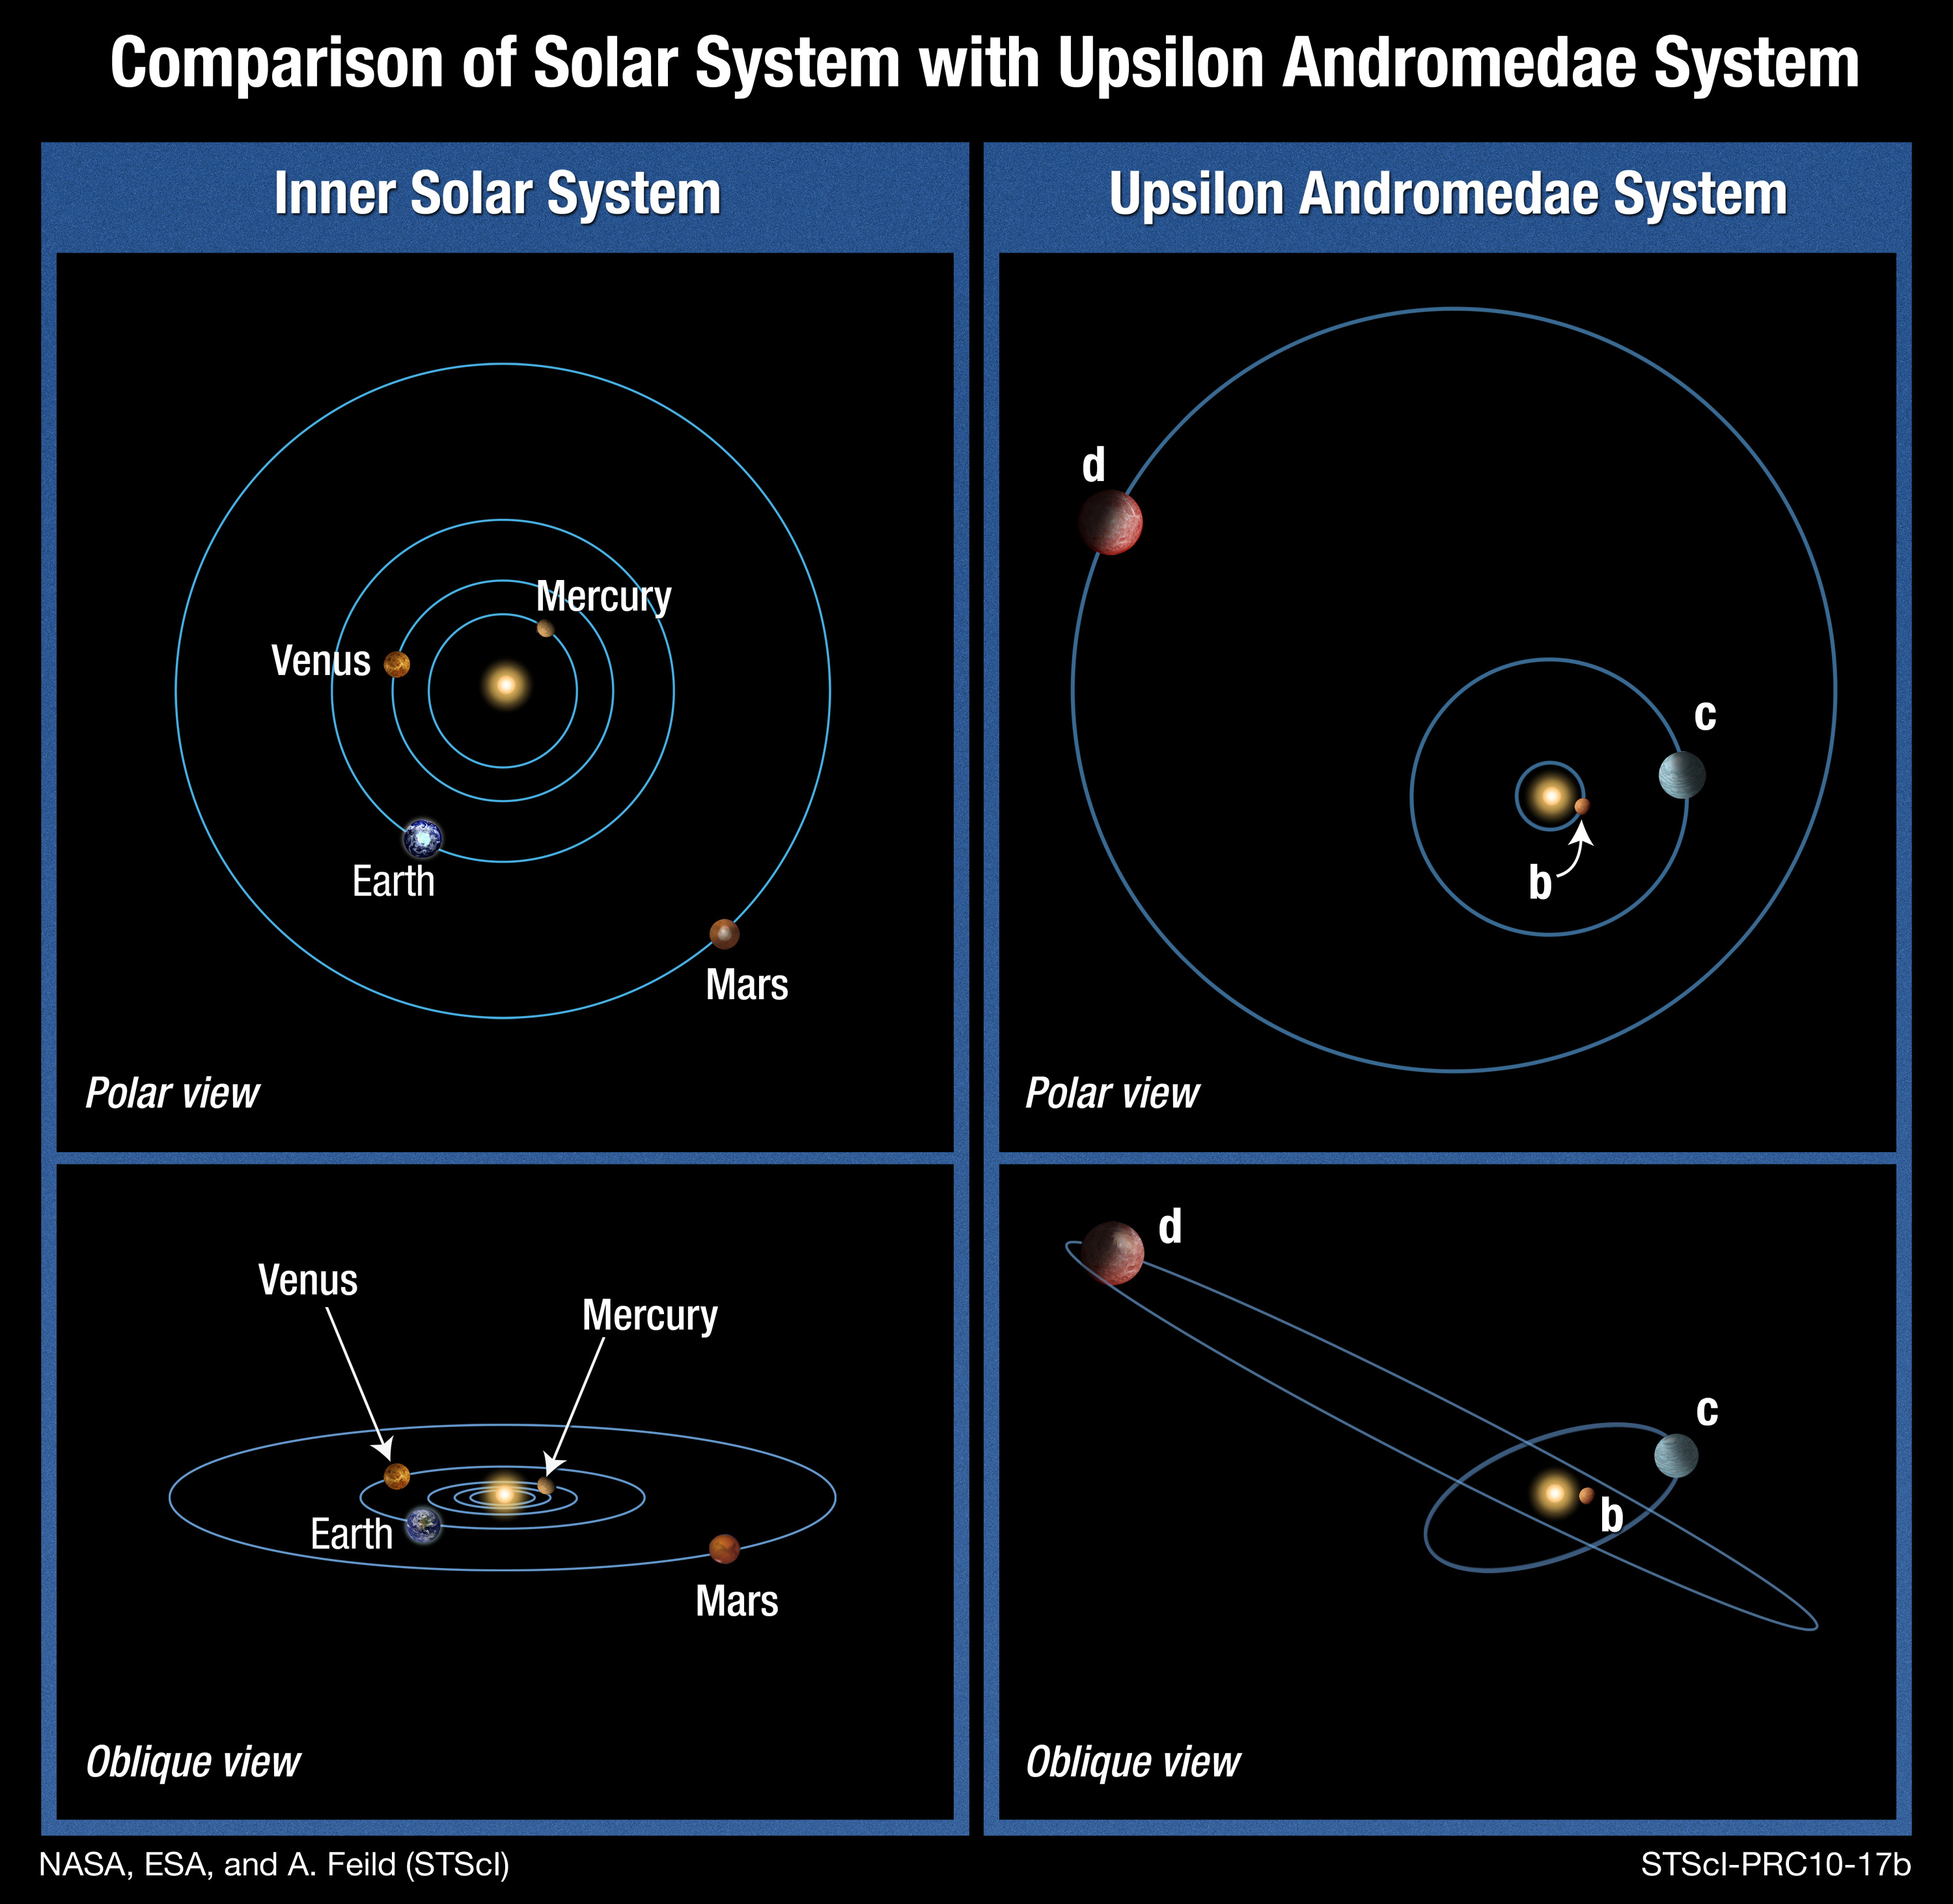

Comparison of Solar System with Upsilon Andromedae system

This is an artist's illustration that compares the Solar System with the Upsilon Andromedae system. Astronomers have recently discovered that not all planets orbit the bright yellow-white star Upsilon Andromedae in the same plane, as the major planets in our Solar System orbit the Sun. The orbits of two of the planets, c and d, are inclined by 30 degrees with respect to each other. Such a strange orientation has never before been seen in any other planetary system. This surprising finding will impact theories of how planetary systems form and evolve, say researchers. It suggests that some violent events can happen to disrupt planets' orbits after a planetary system forms. The discovery was made by joint observations with the Hubble Space Telescope, the Hobby-Eberly Telescope, and other ground-based telescopes.

Credit: NASA, ESA, and A. Feild (STScI). Science Credit: NASA, ESA, and B. McArthur (The University of Texas at Austin McDonald Observatory)